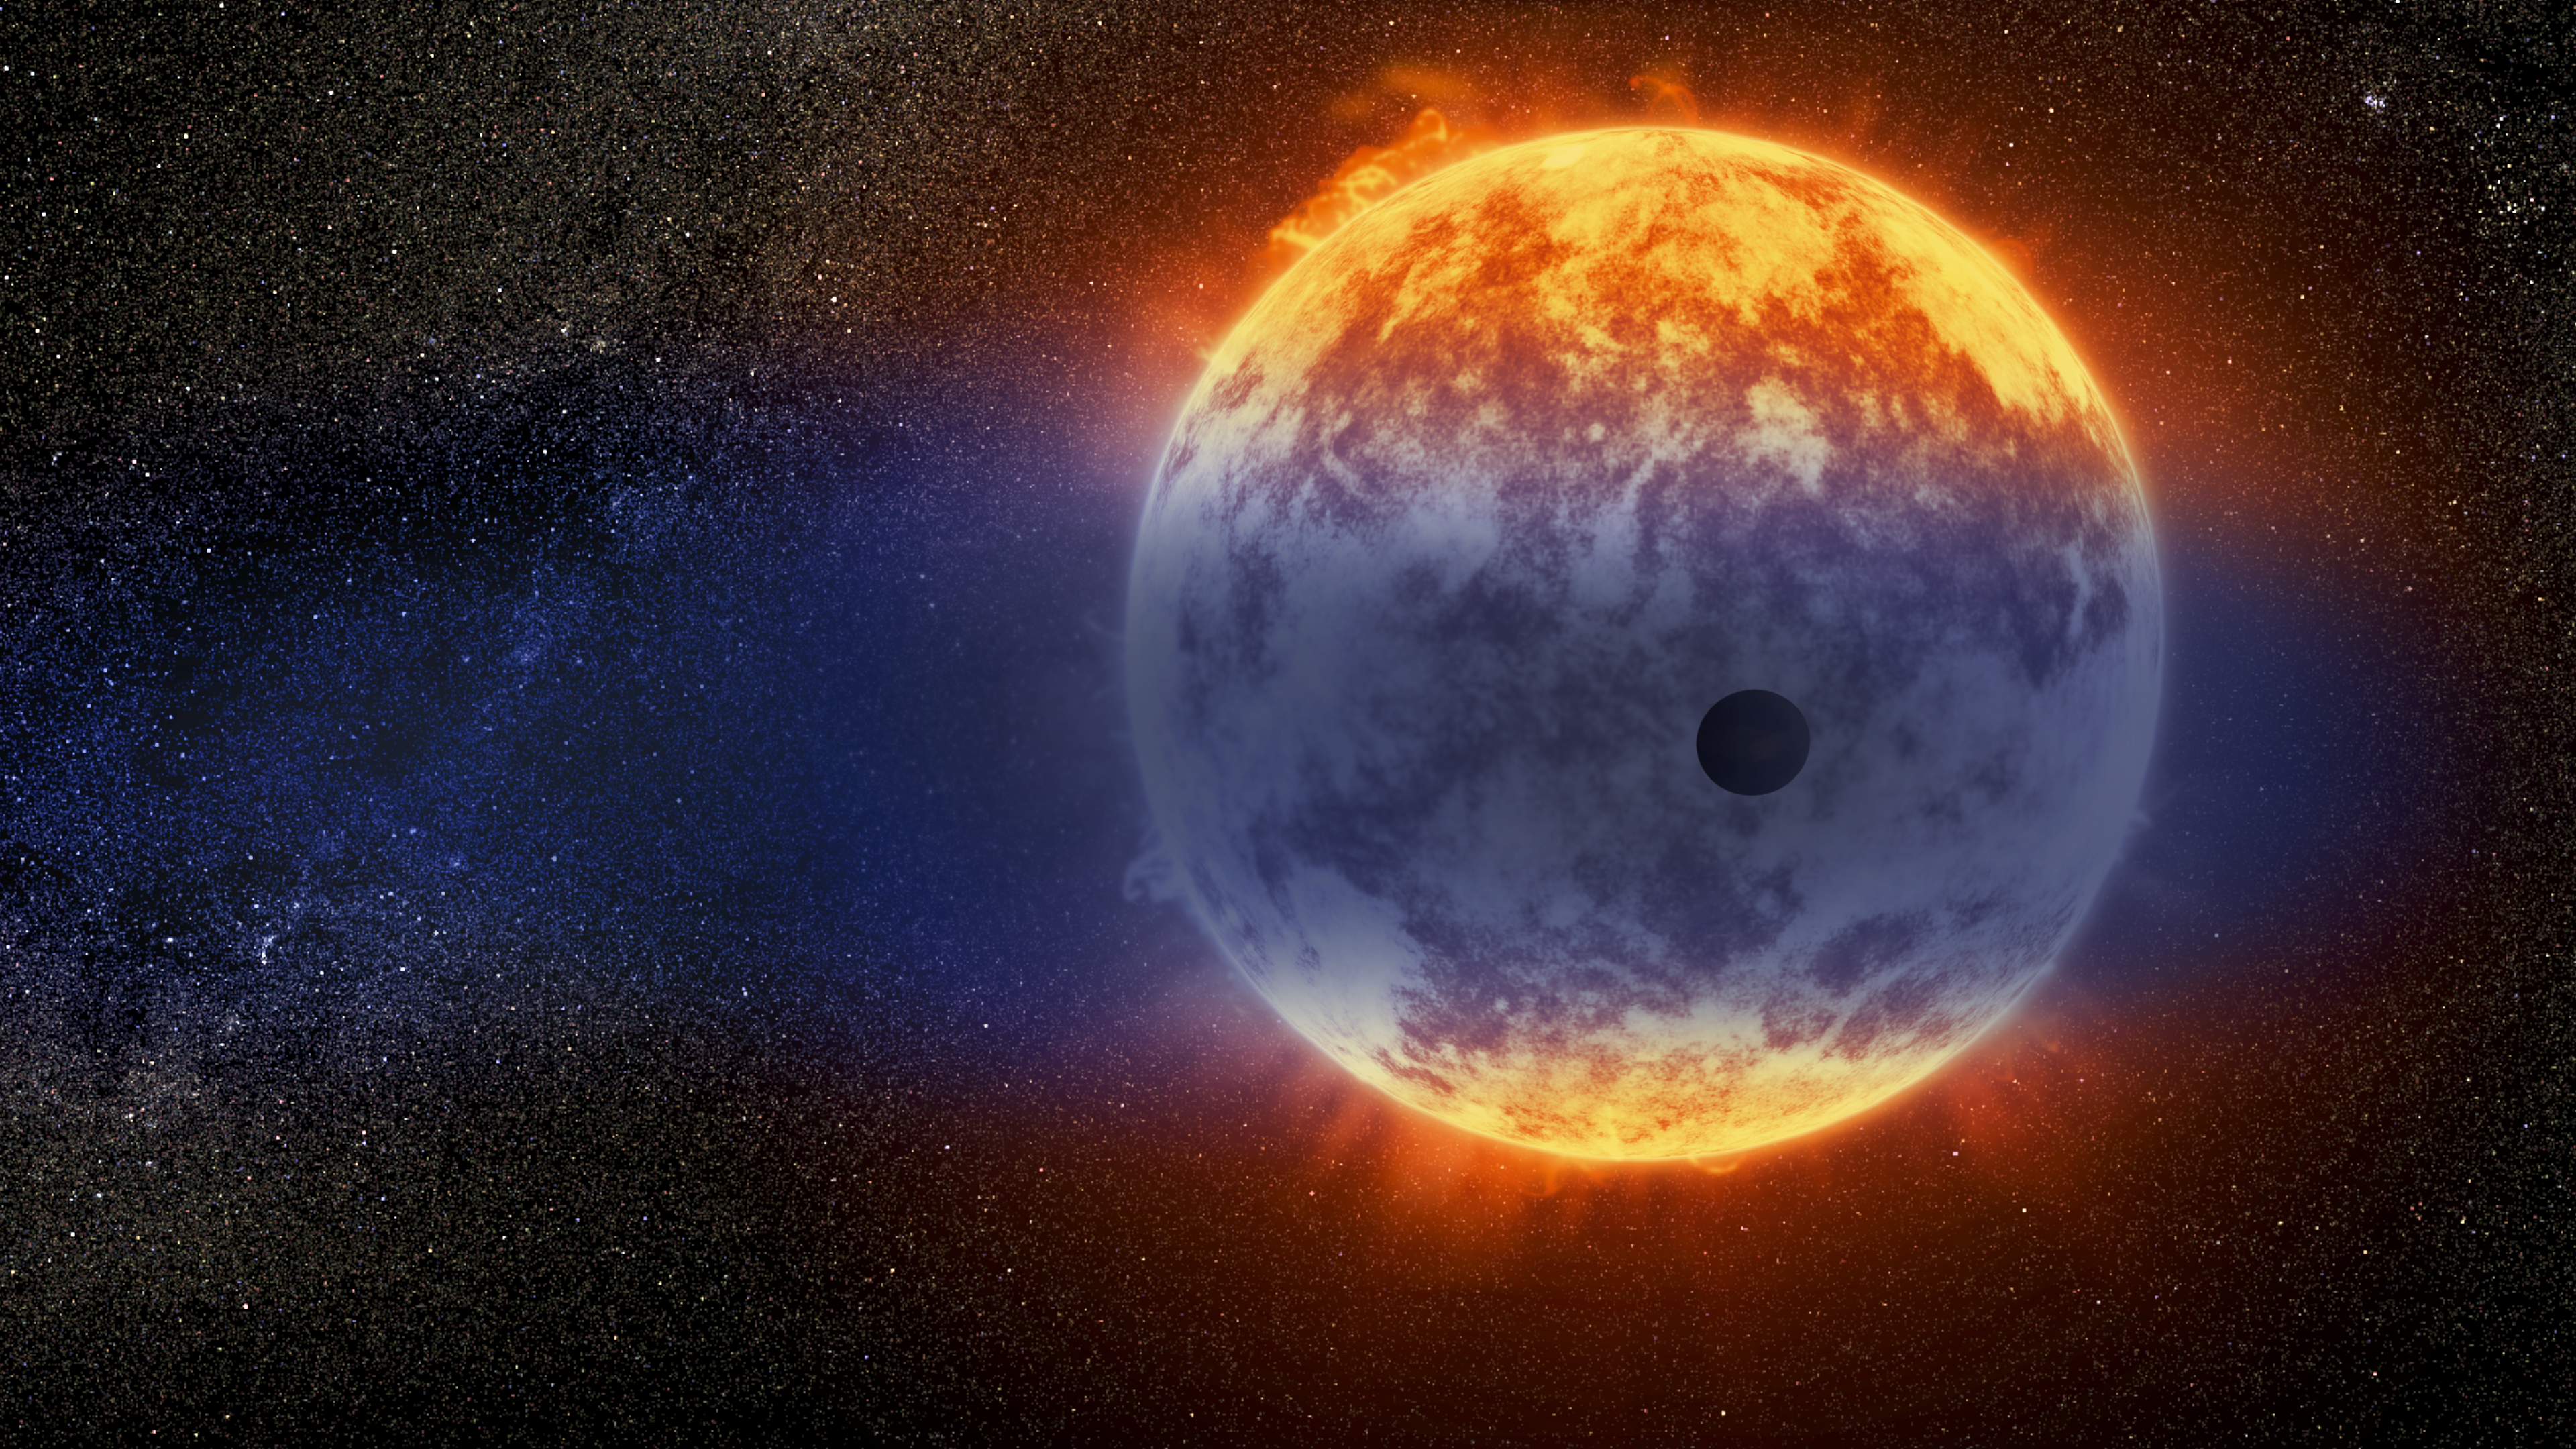

Artist's impression of gas streaming from GJ 3470b

This artist's impression shows a giant cloud of hydrogen streaming off a warm, Neptune-sized planet just 97 light-years from Earth. The exoplanet is tiny compared to its star, a red dwarf named GJ 3470. The star's intense radiation is heating the hydrogen in the planet's upper atmosphere to a point where it escapes into space. The alien world is losing hydrogen at a rate 100 times faster than a previously observed warm Neptune whose atmosphere is also evaporating away.

Credit: NASA, ESA, and D. Player (STScI)